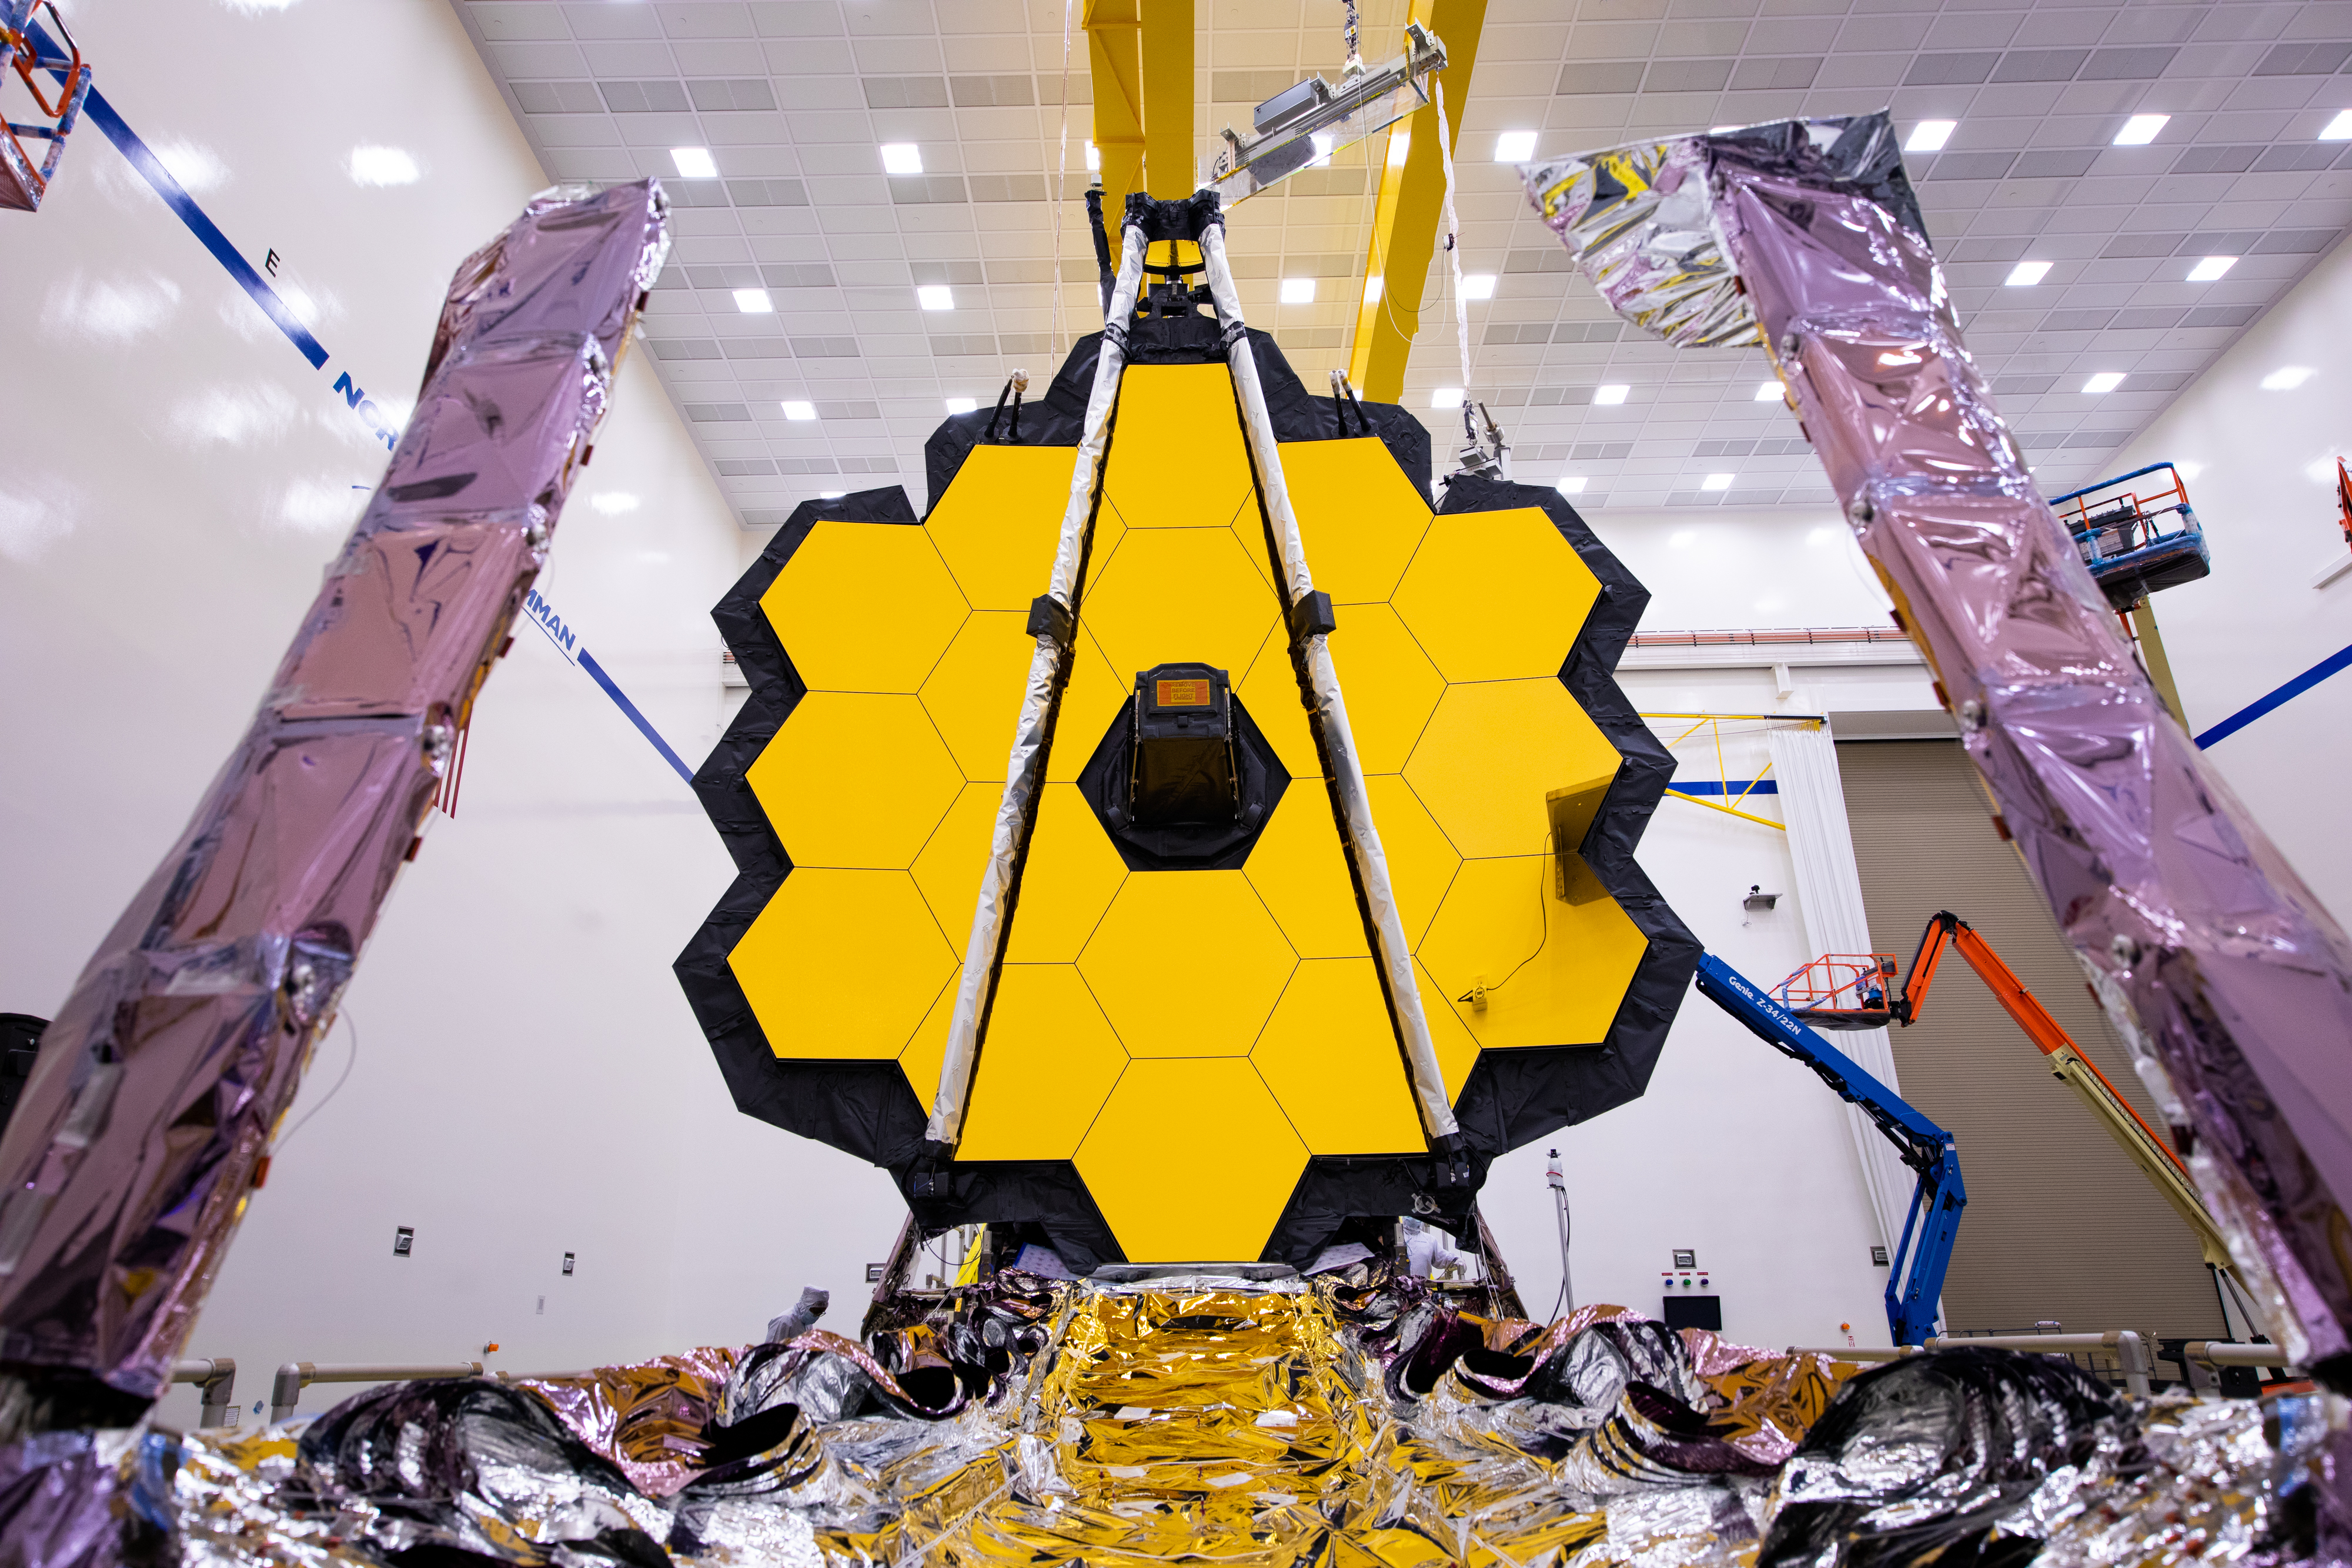

Webb in the Northrop Grumman cleanroom

Spring has arrived, the flowers are blooming and so have the mirrors of NASA's James Webb Space Telescope. These three pictures help visually show how Webb’s iconic 21 foot 4-inch (6.5 meter) primary mirror has been built to fold to a much smaller size for takeoff.

Read more about Webb's recently successful mirror deployment test: go.nasa.gov/2Rq09P0

Credit: NASA/Chris Gunn